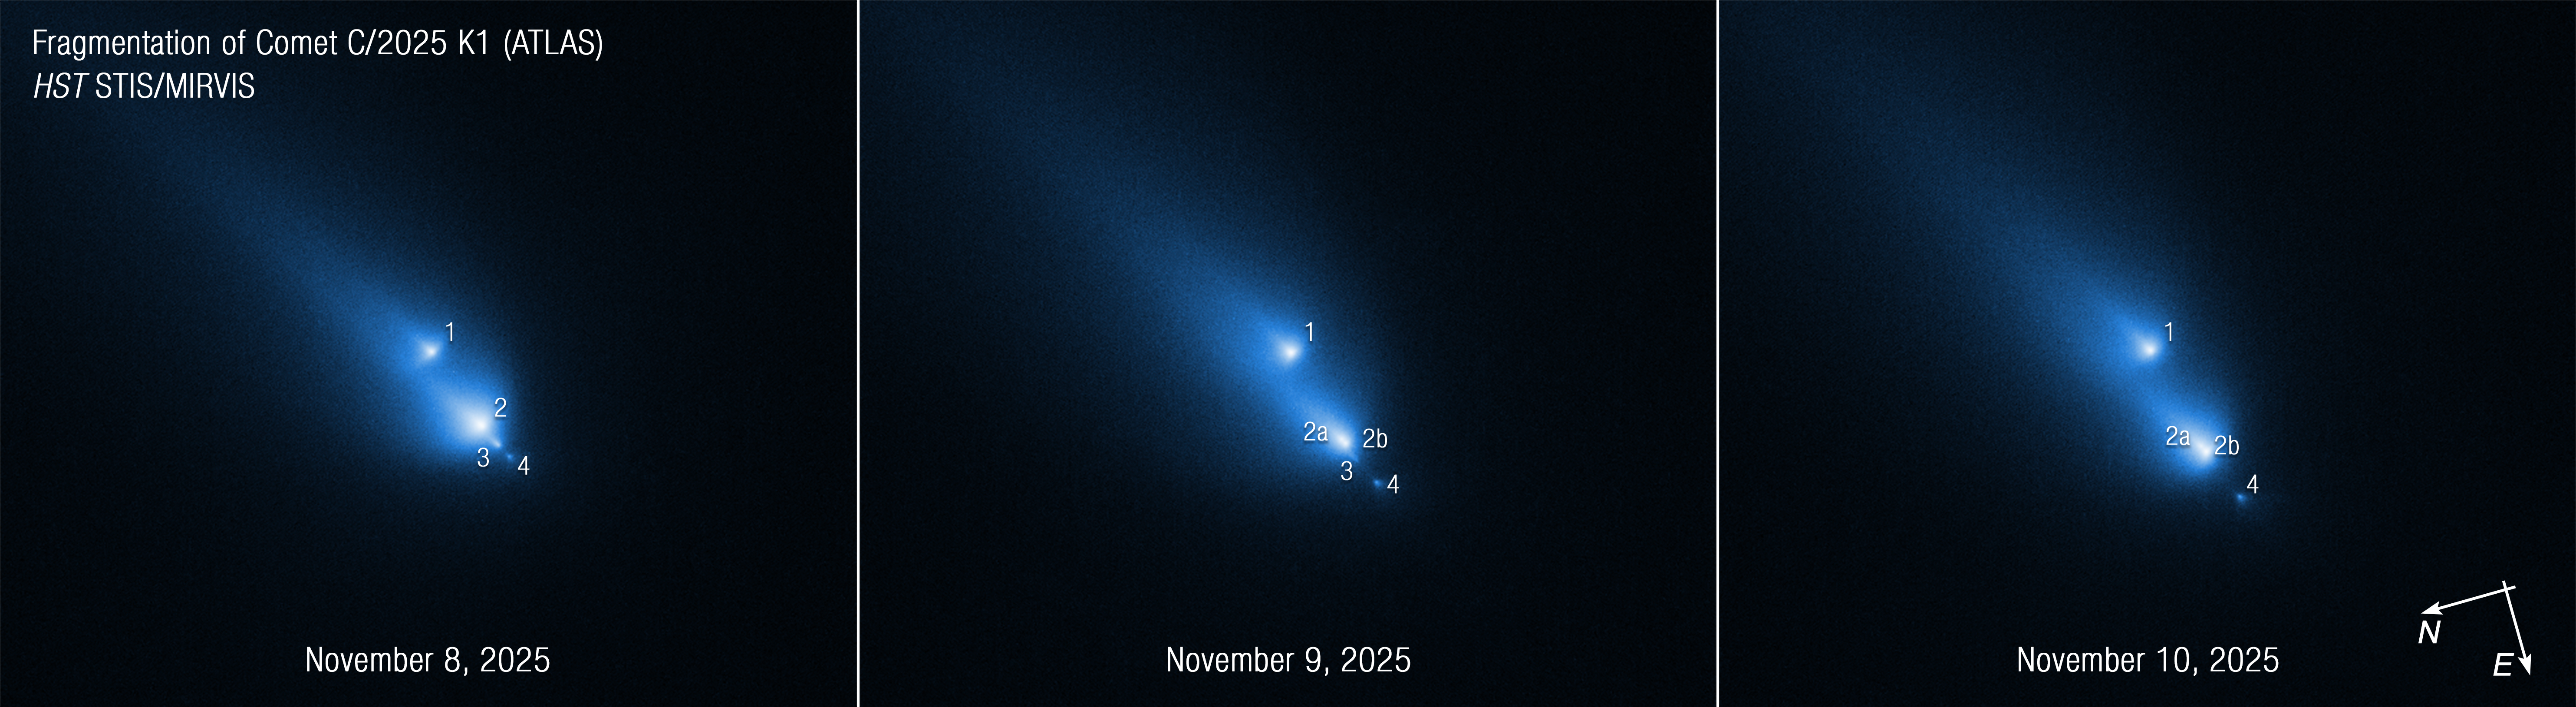

Comet C/2025 K1 (ATLAS): November 2025 (annotated)

This series of Hubble Space Telescope images of the fragmenting comet C/2025 K1 (ATLAS), or K1 for short, was taken over the course of three consecutive days: November 8, 9, and 10, 2025. Captured by Hubble’s STIS (Space Telescope Imaging Spectrograph) instrument, the sequence shows the progressive disintegration of the comet over this brief period. This is the first time Hubble has witnessed a comet so early in the process of breaking up.

Hubble caught K1 fragmenting into at least four pieces, each with a distinct coma, the fuzzy envelope of gas and dust that surrounds a comet’s icy nucleus. Hubble cleanly resolved the fragments, but from the ground they only appeared as barely distinguishable blobs.

Credit: NASA, ESA, D. Bodewits (Auburn). Image processing: J. DePasquale (STScI)